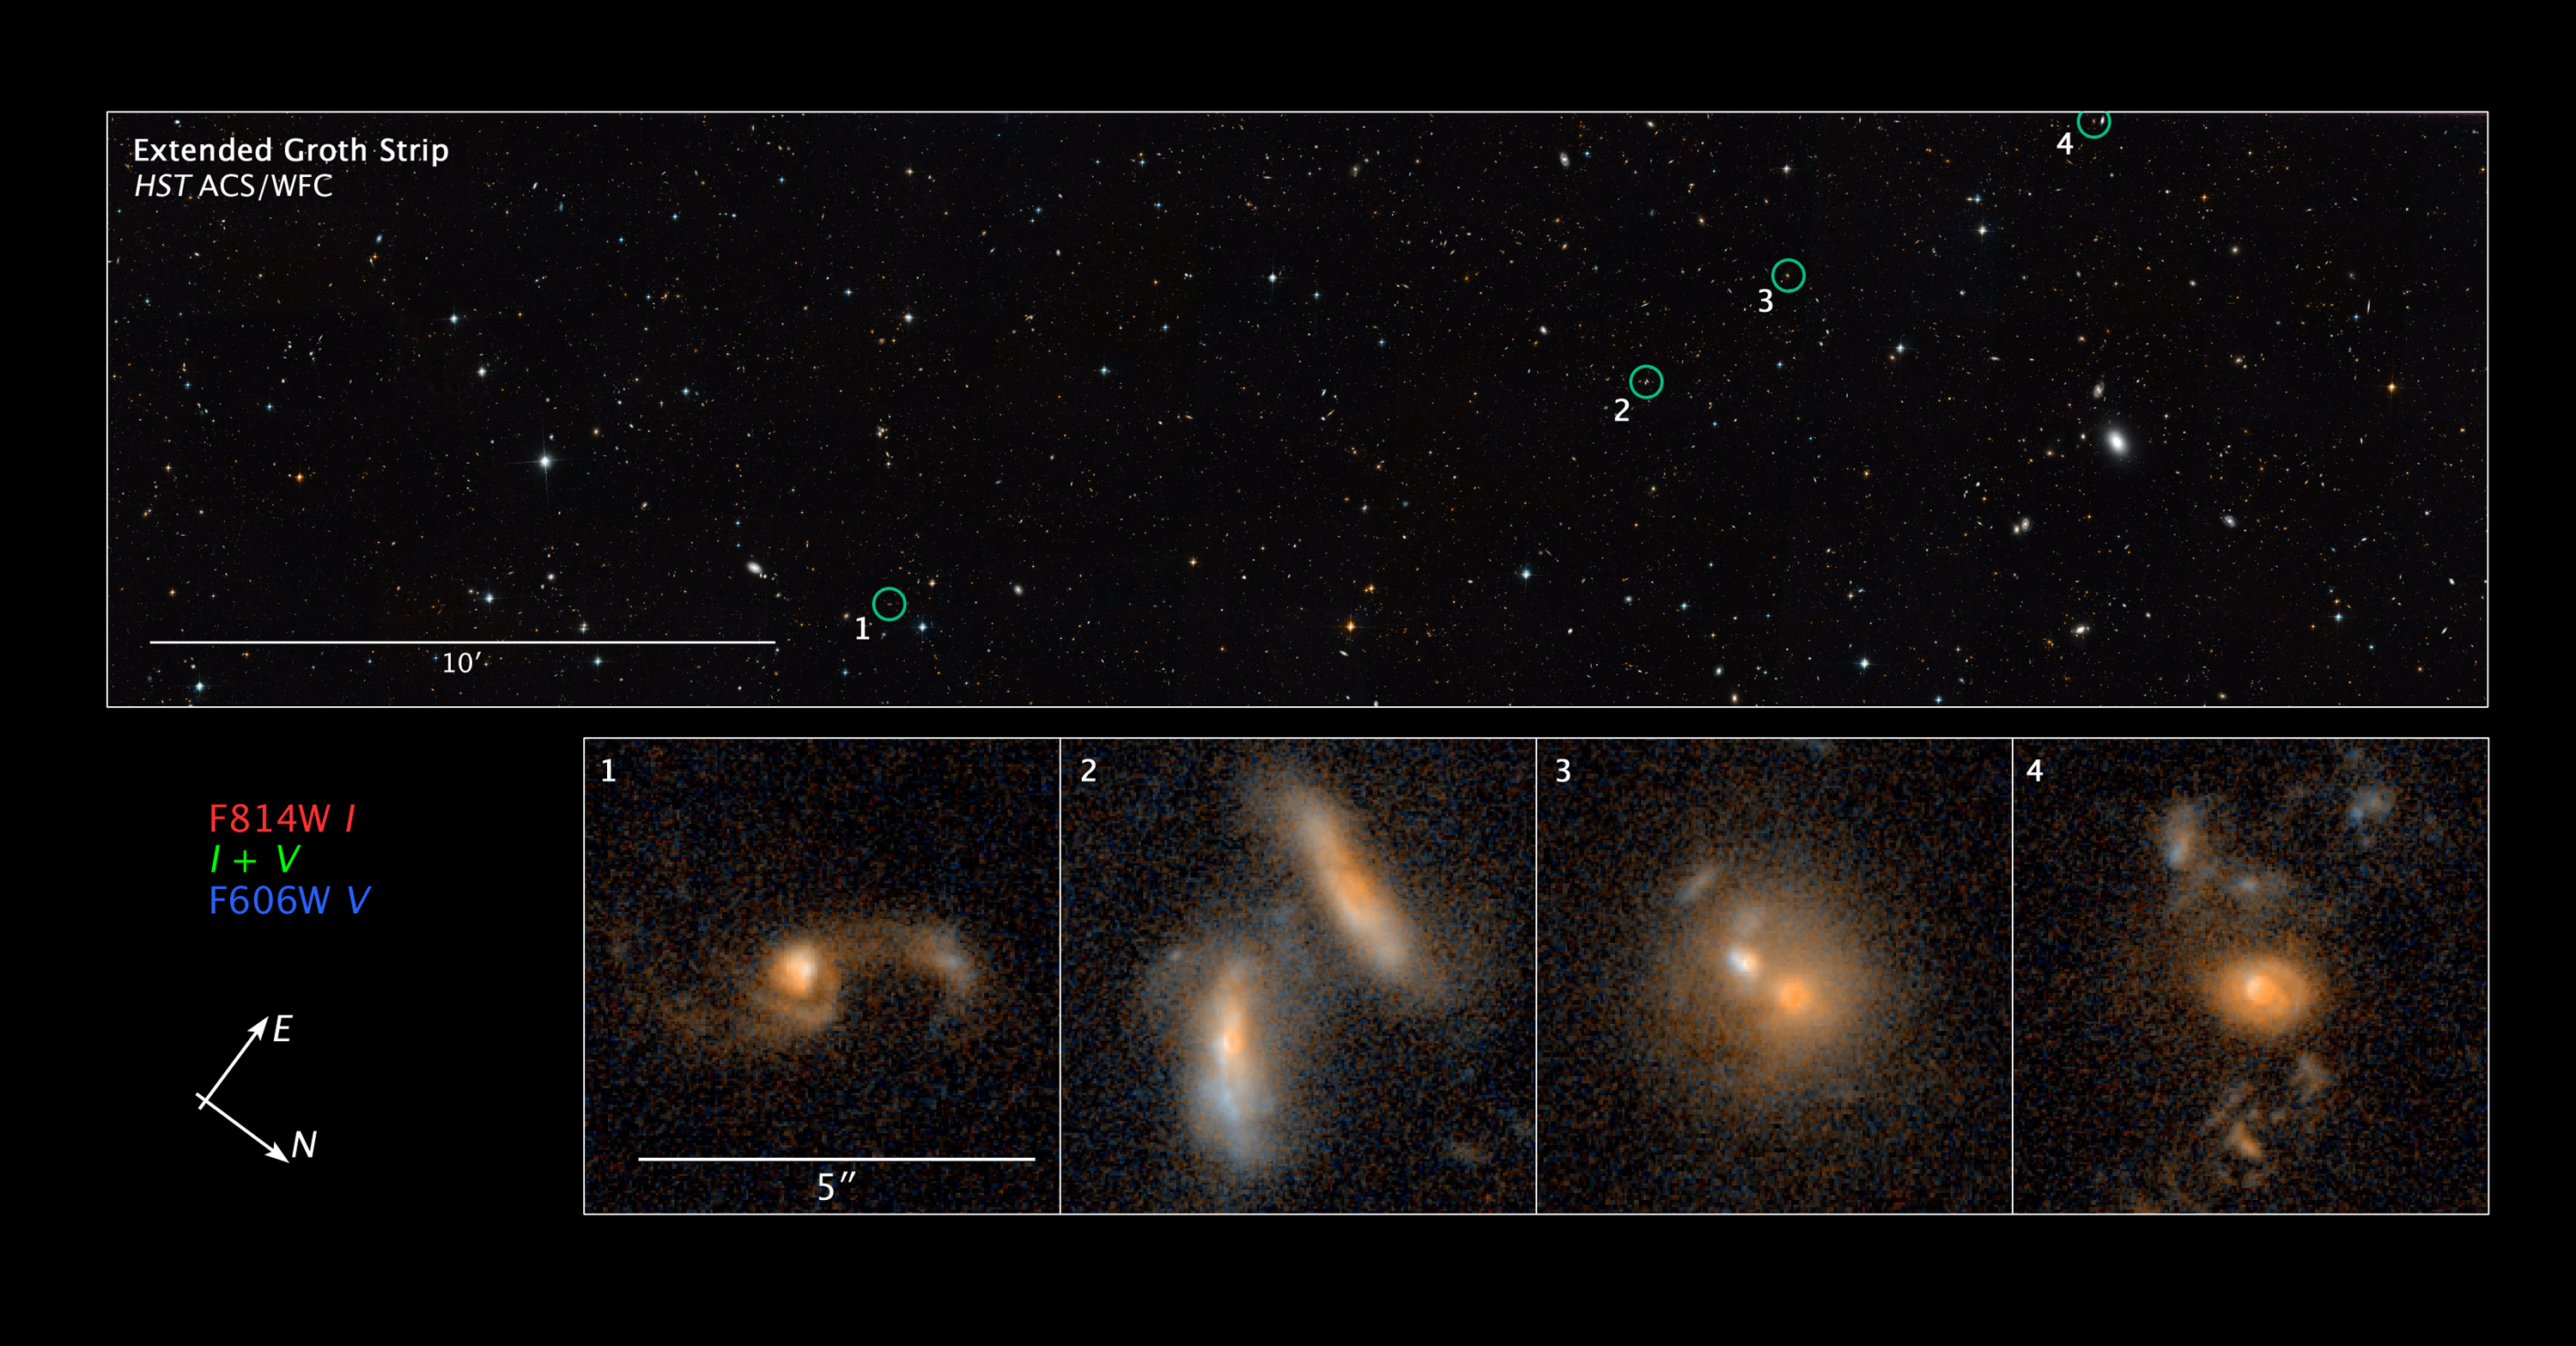

Compass and scale image of merging galaxies in the Extended Groth Strip

This image displays several merging galaxies (identified by the green circles) found in different regions of a large survey known as the All-Wavelength Extended Groth Strip International Survey (AEGIS). Hubble's Advanced Camera for Surveys took the image in 2004 and 2005. The galaxies reside at a range of distances from Earth, from 2.4 billion to 6.2 billion light-years away.

By studying many galaxy interactions at various distances from Earth, astronomers can measure the rate at which galaxies merge over time. This information yields important clues about how galaxies have changed throughout the Universe's history.

Credit: NASA, ESA, and Z. Levay (STScI). Science Credit: NASA, ESA, and J. Lotz (STScI)